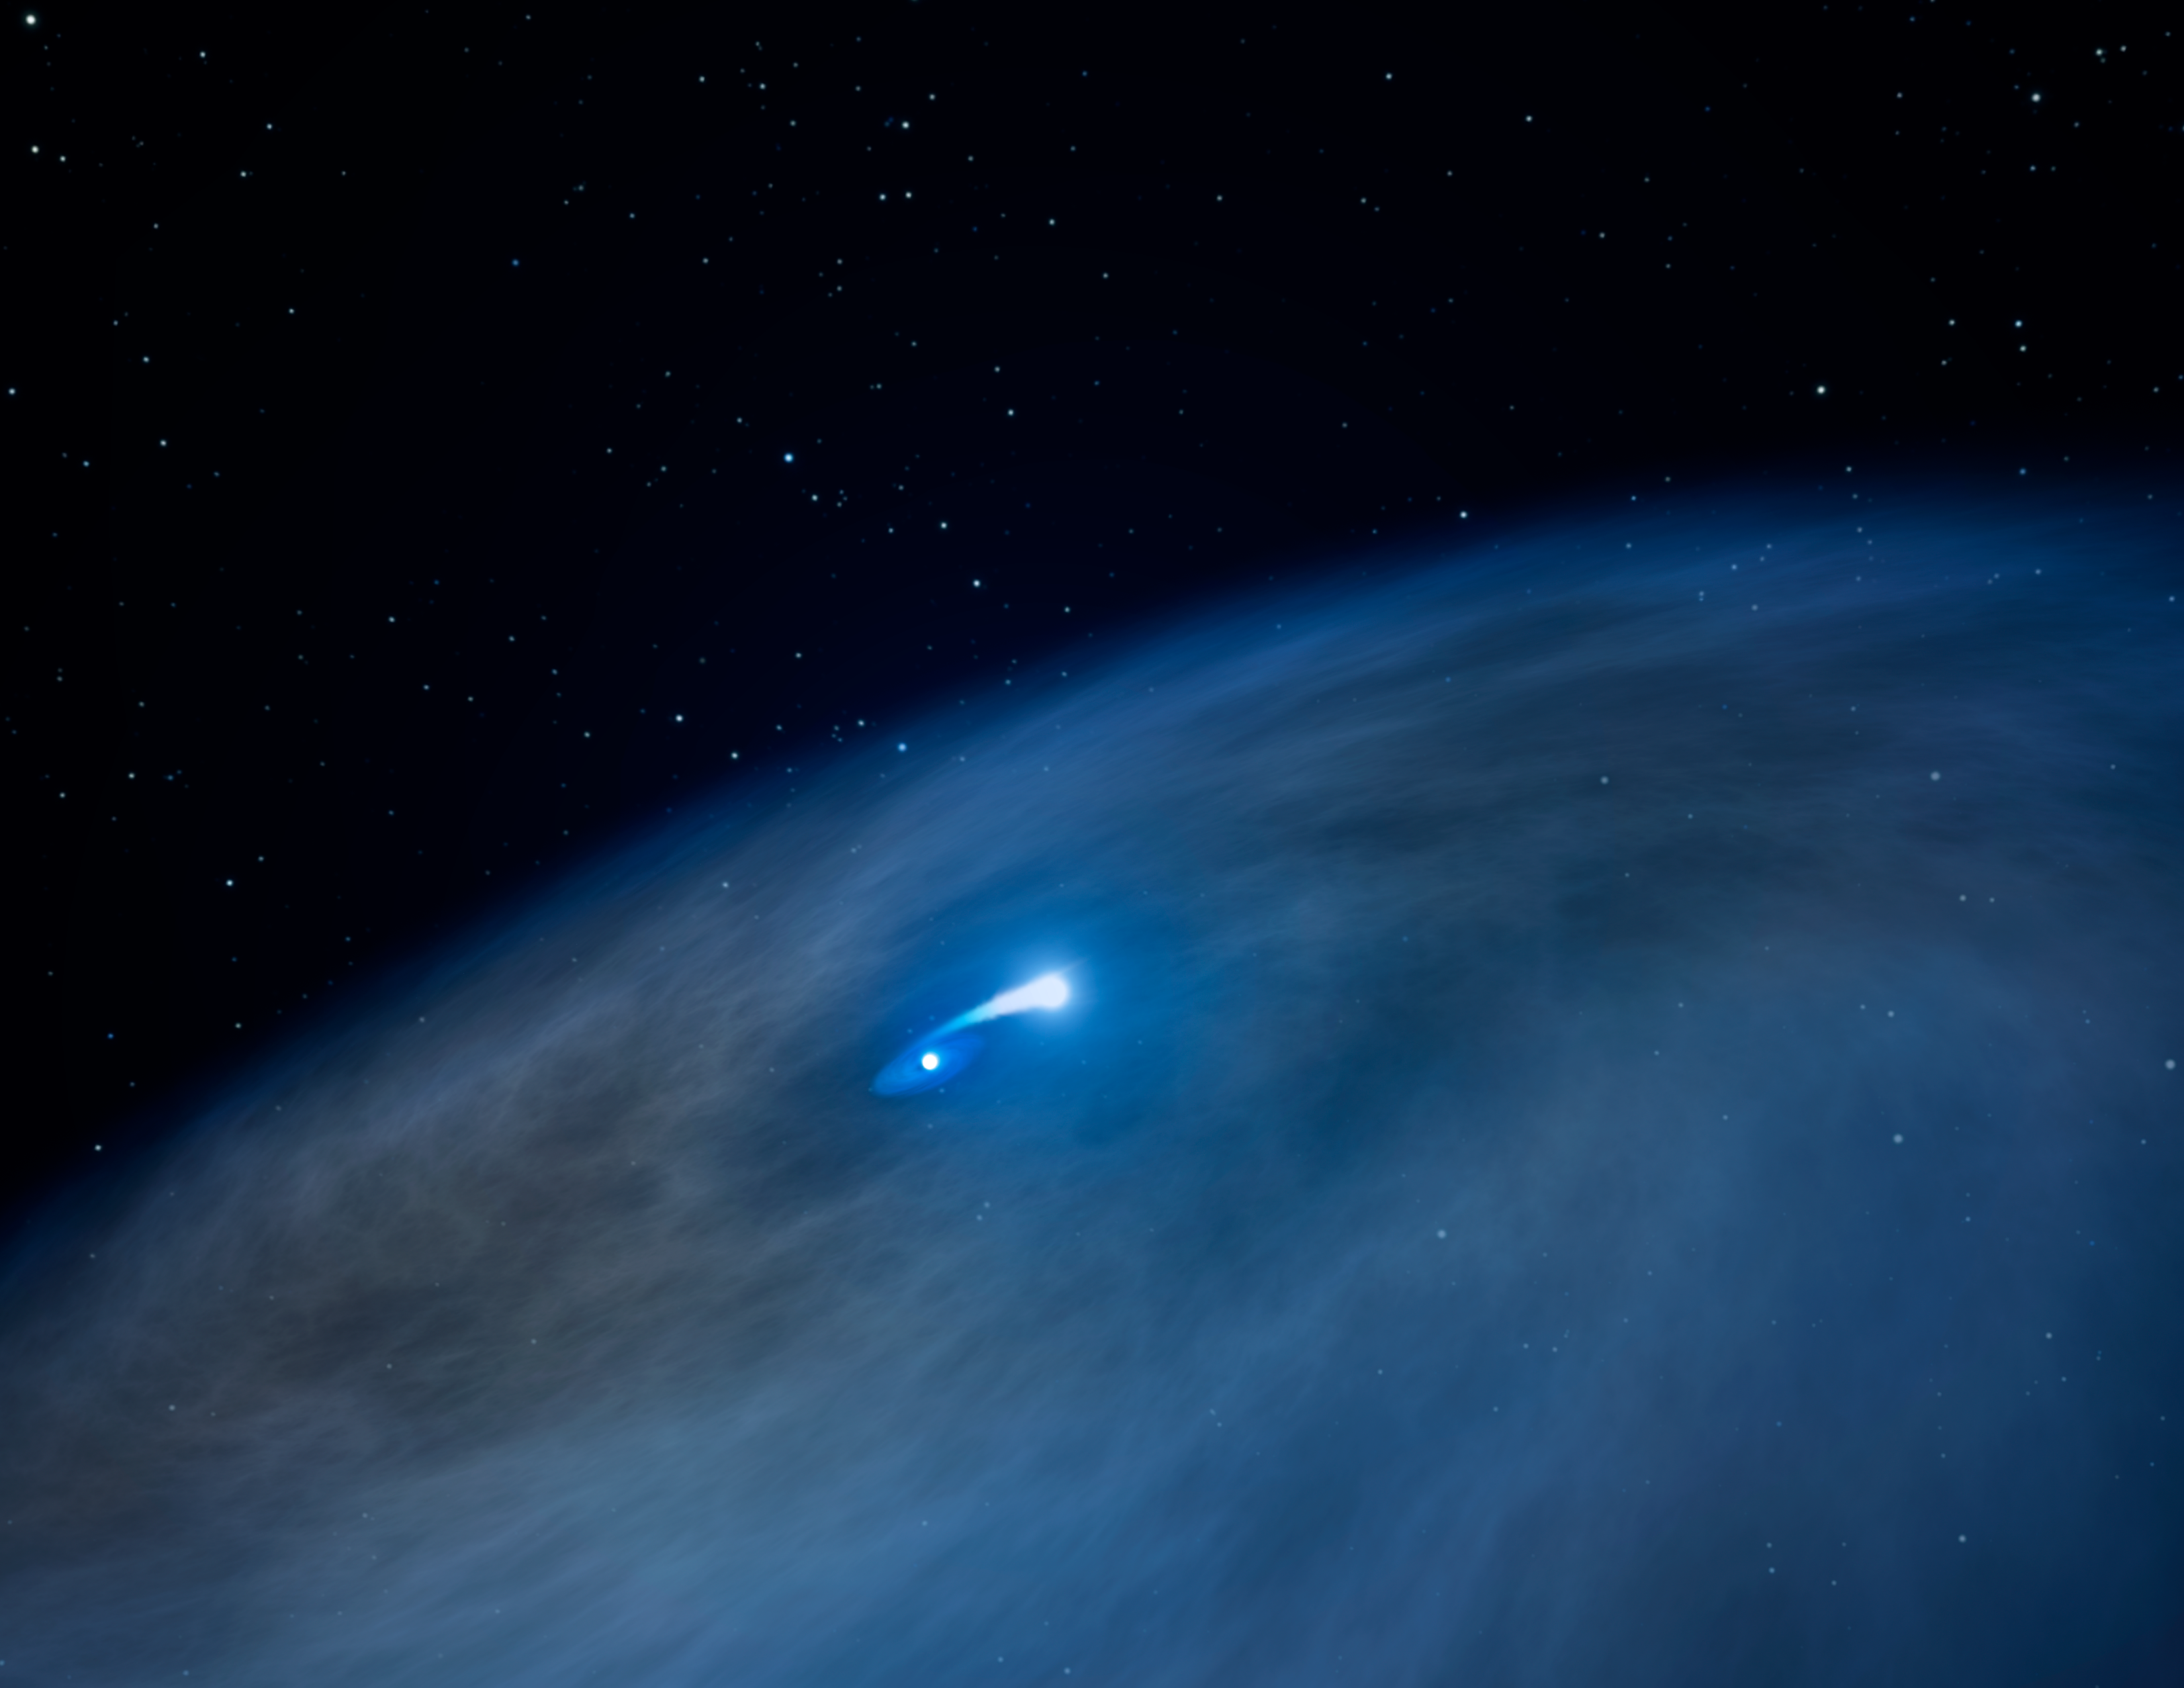

Hubble spies vast gas disk around unique massive star

This artist's illustration reveals a vast disk of gas surrounding a massive, bright Wolf-Rayet star (shown at center). A close companion star is pulling gas from the Wolf-Rayet, shown by the bridge of bright material connecting the two stars. This act of celestial cannibalism exposes the massive star's hot, helium core. Some of the material, however, is escaping into space, forming the huge disk. This disk structure has never been seen before around a Wolf-Rayet star.

Credit: NASA, ESA, and G. Bacon (STScI) Science Credit: NASA, ESA, and J. Mauerhan (University of California, Berkeley)